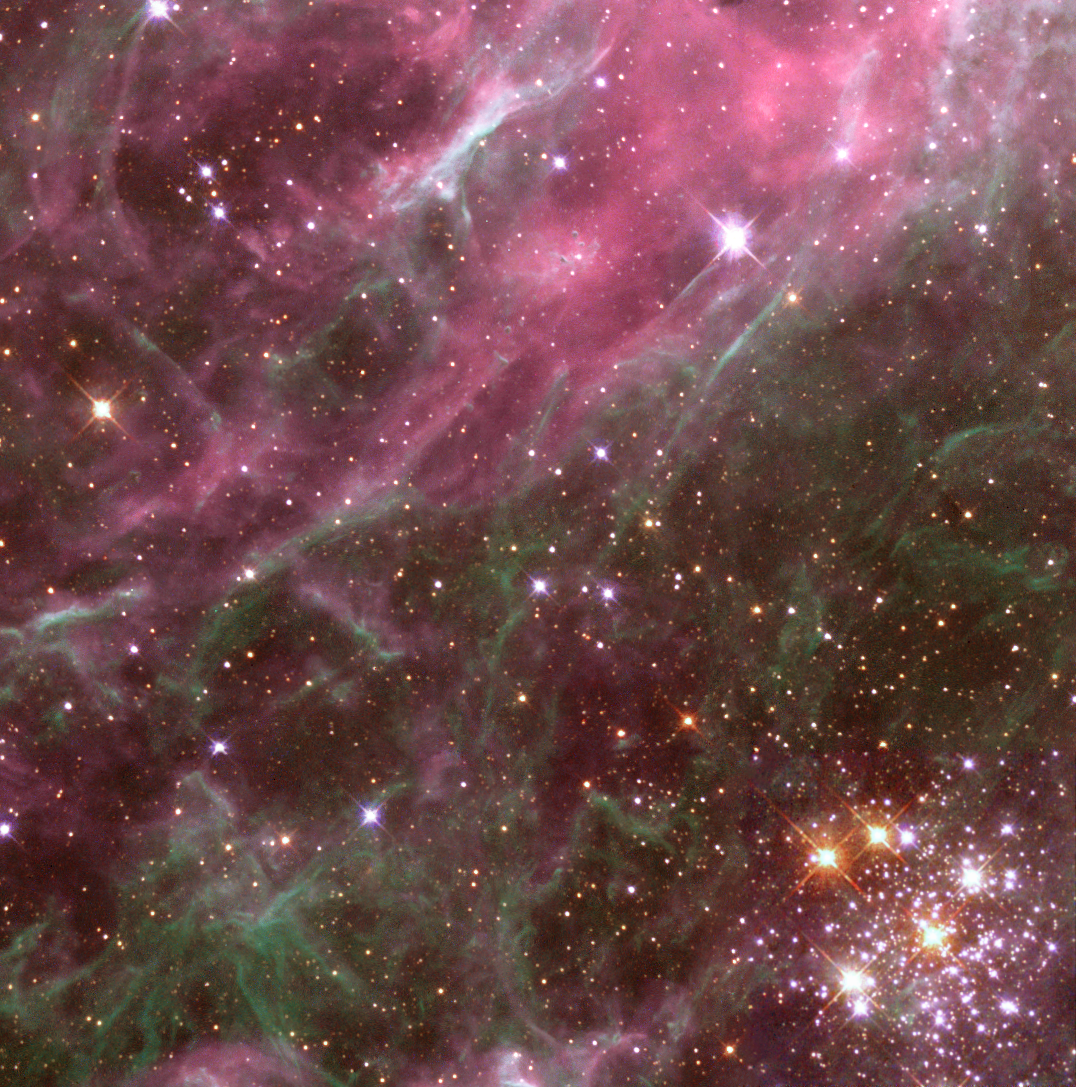

Multiple generations of stars in the Tarantula Nebula

In the most active starburst region in the local universe lies a cluster of brilliant, massive stars, known to astronomers as Hodge 301.

Hodge 301, seen in the lower right hand corner of this image, lives inside the Tarantula Nebula in our galactic neighbor, the Large Magellanic Cloud.

Credit: Hubble Heritage Team (AURA/STScI/NASA/ESA)